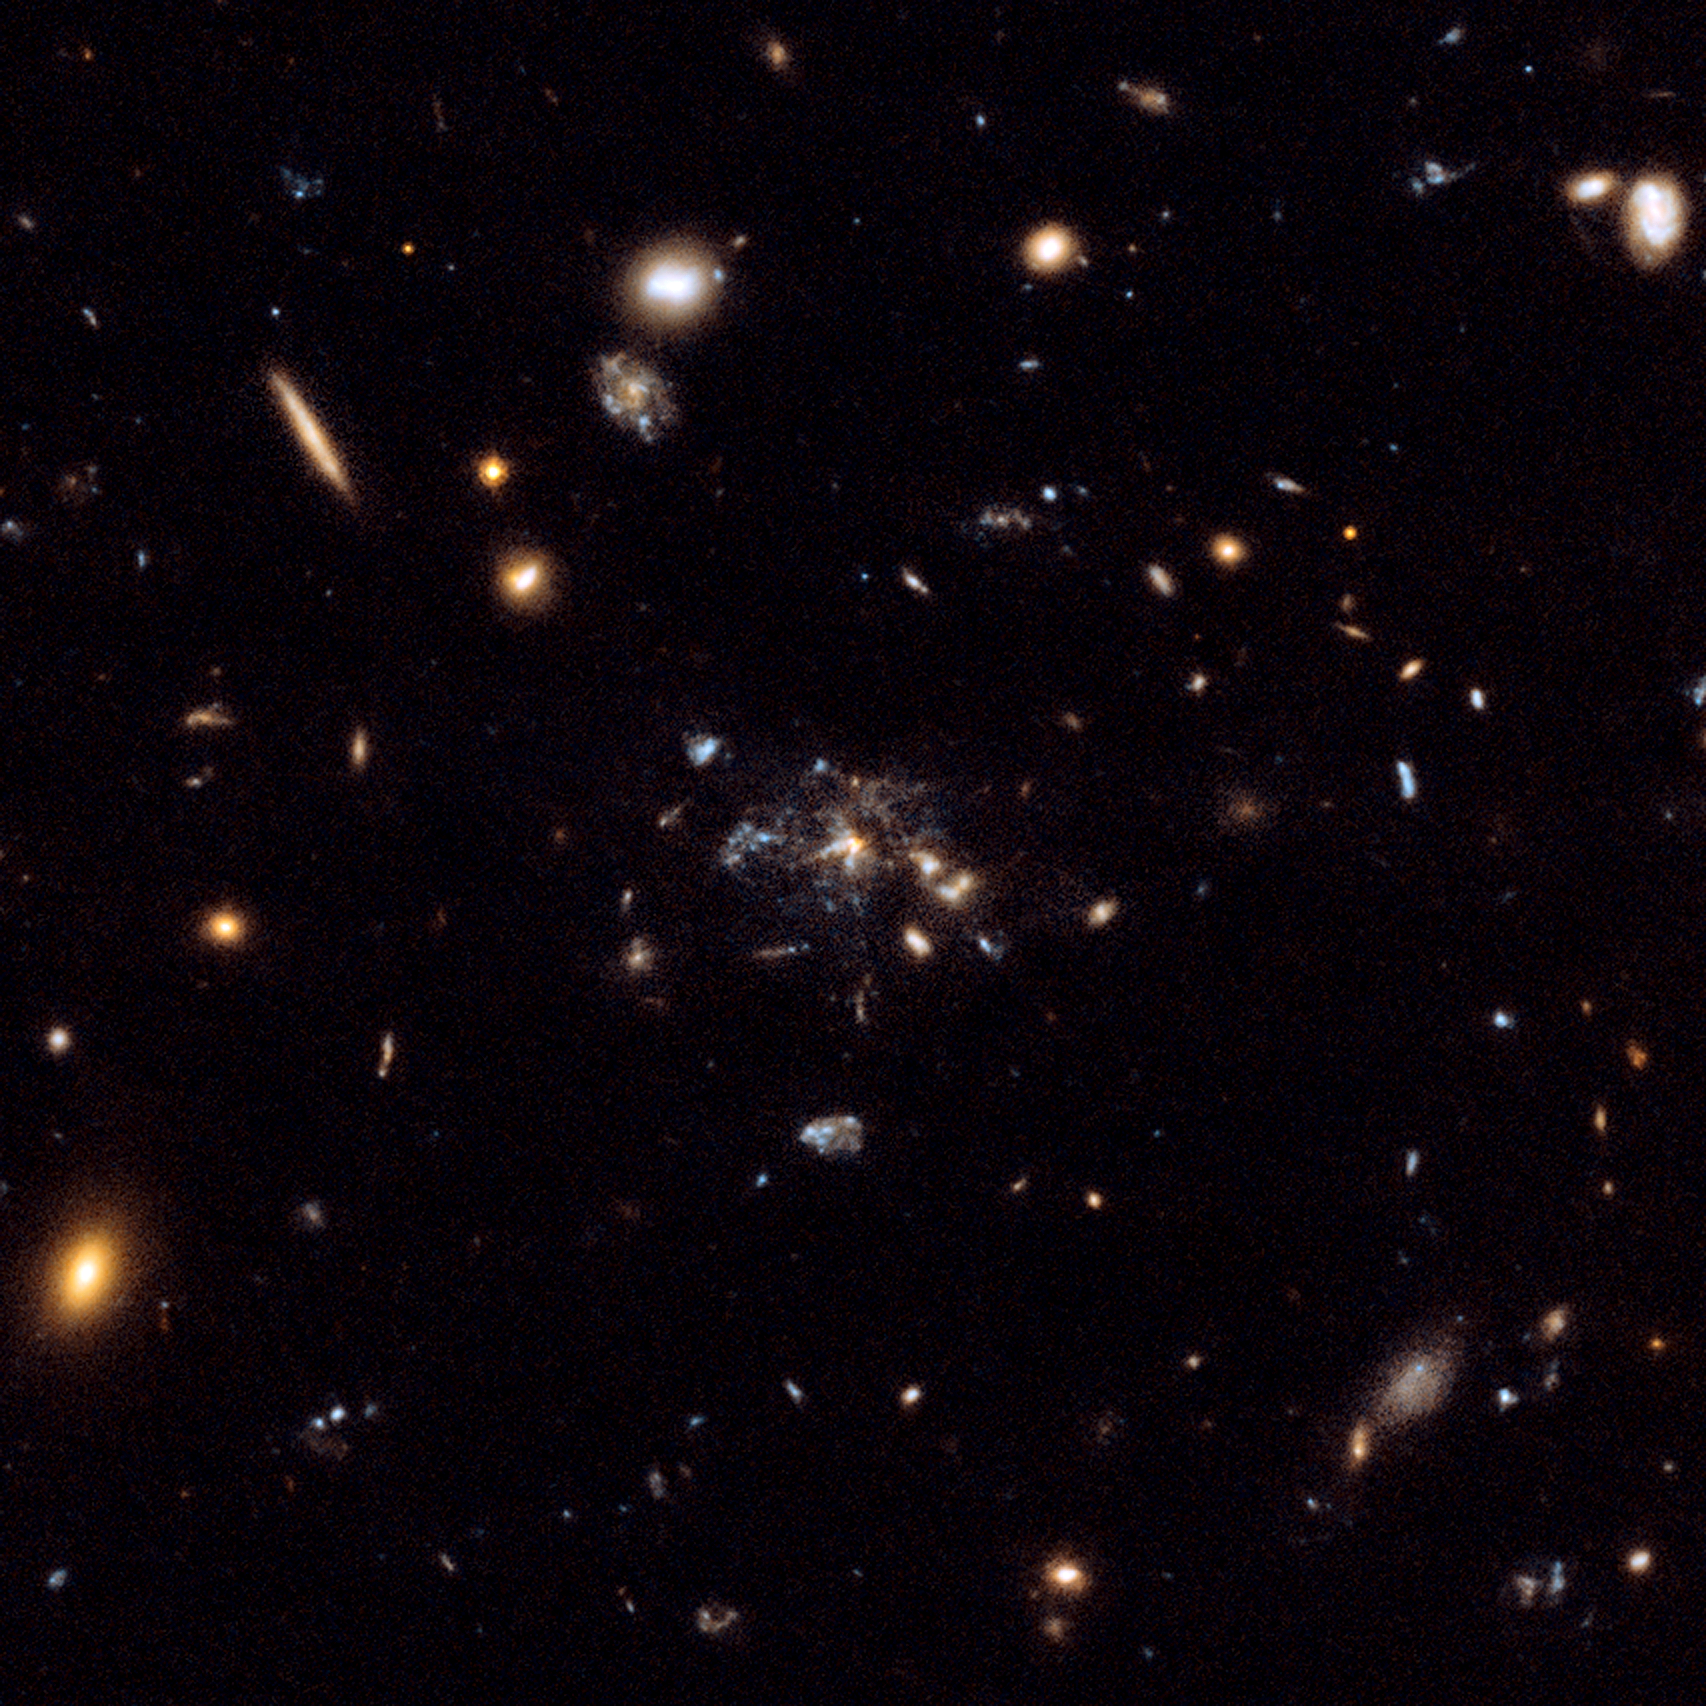

Flies in a spider's web: Galaxy caught in the making

This image is a composite of many separate exposures made by the ACS instrument on the Hubble Space Telescope using several different filters. It shows the Spiderweb Galaxy sitting at the centre of an emergent galaxy cluster, surrounded by hundreds of other galaxies from the cluster.

The image provides a dramatic glimpse of a large massive galaxy under assembly as smaller galaxies merge. This has commonly been thought to be the way galaxies grew in the young Universe, but now the Hubble observations of the radio galaxy MRC 1138-262, nicknamed the "Spiderweb Galaxy", have shown dozens of star-forming satellite galaxies in the actual process of merging.

Credit: NASA, ESA, G. Miley and R. Overzier (Leiden Observatory), and the ACS Science Team
Acknowledgement: Davide De Martin (ESA/Hubble).